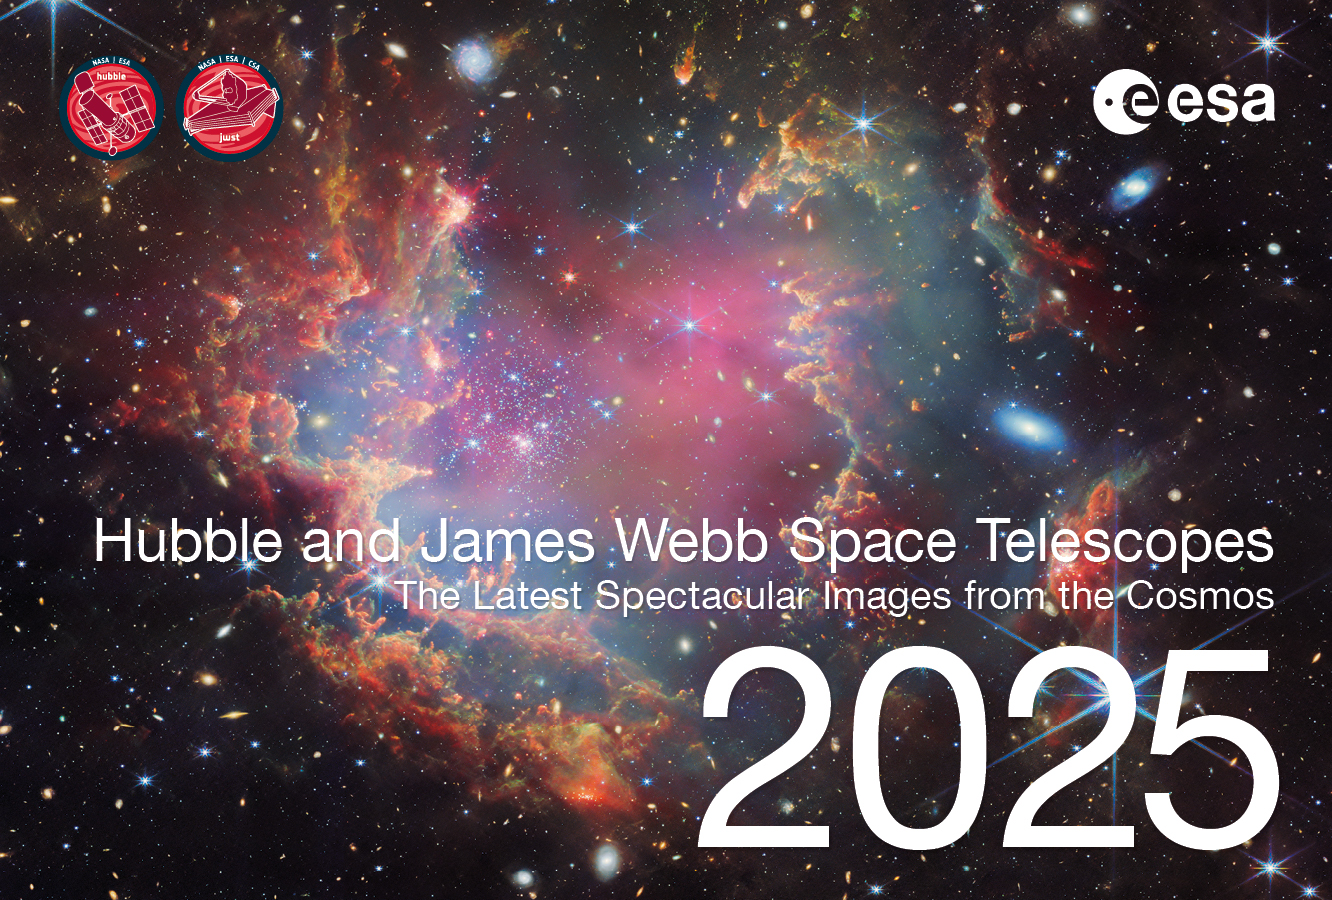

Cover page of the 2025 ESA/Hubble and ESA/Webb calendar

This is the cover page for the 2025 ESA/Hubble and ESA/Webb Calendar, featuring images released in 2024. The electronic version of the calendar is available in digital (low and high resolution) and print-ready versions for everyone to share and enjoy.

Credit: ESA/Hubble, ESA/Webb